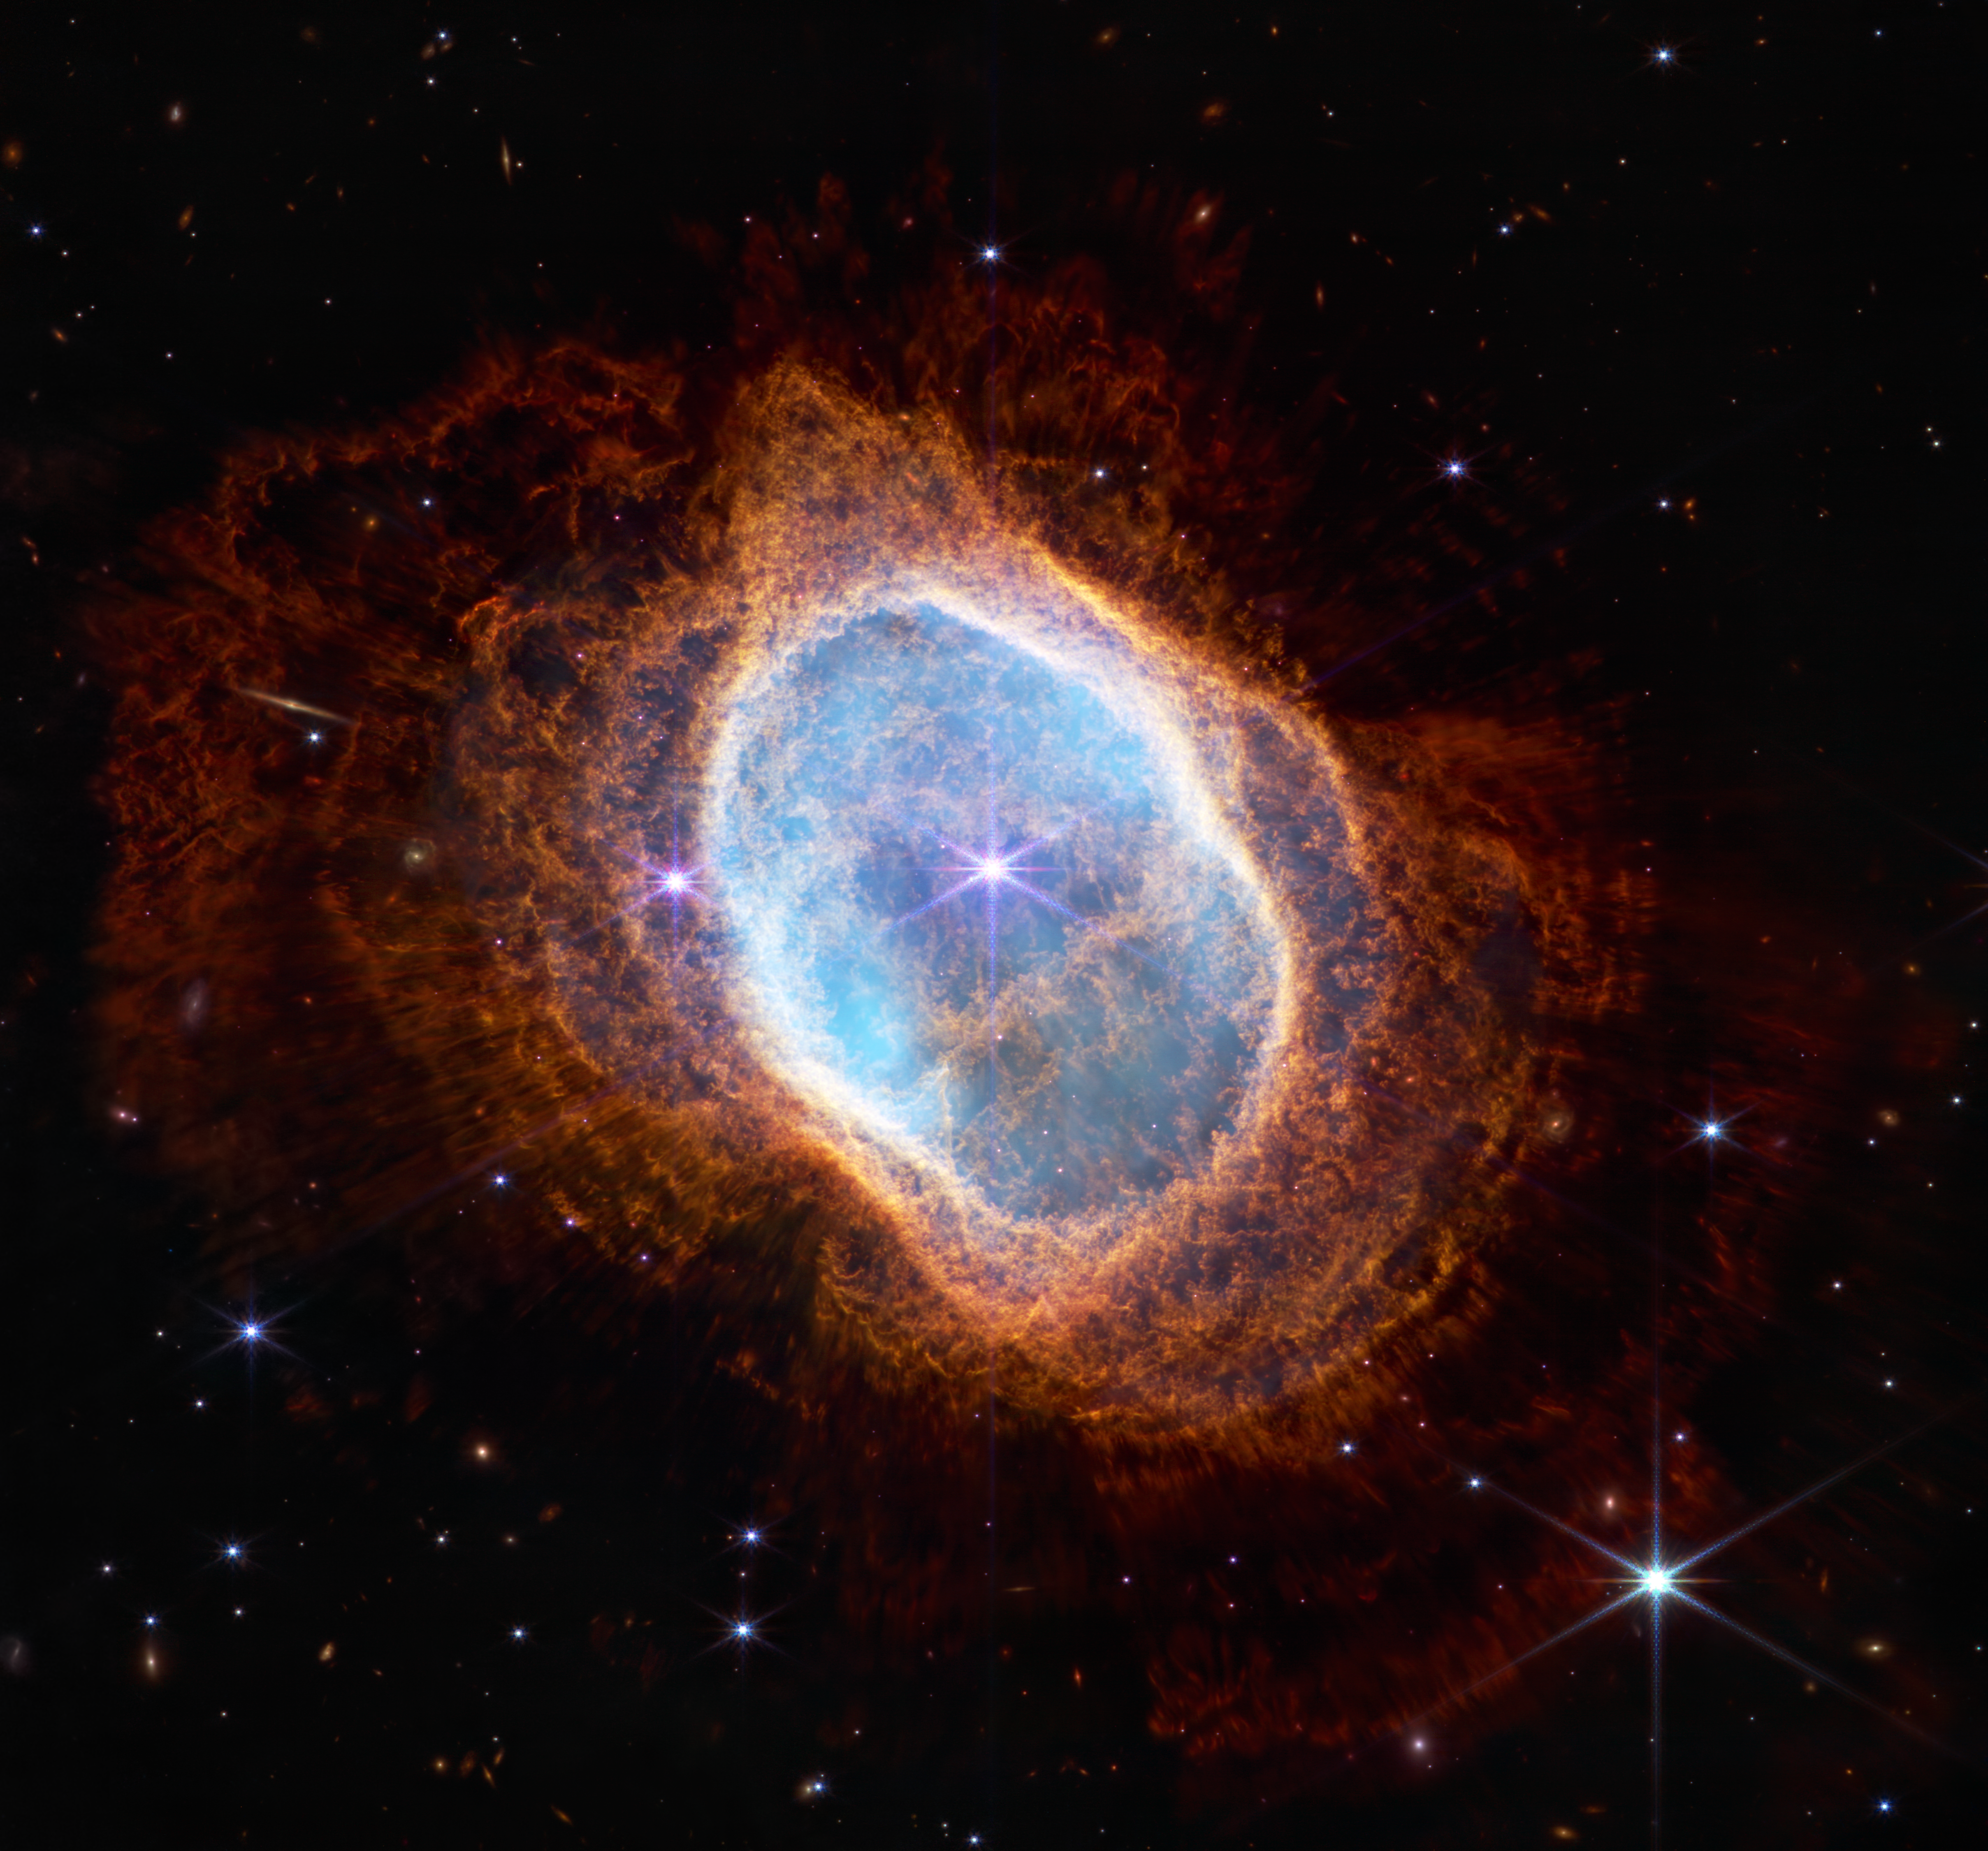

Southern Ring Nebula (NIRCam Image)

The bright star at the centre of NGC 3132, while prominent when viewed by the NASA/ESA/CSA James Webb Telescope in near-infrared light, plays a supporting role in sculpting the surrounding nebula. A second star, barely visible at lower left along one of the bright star’s diffraction spikes, is the nebula’s source. It has ejected at least eight layers of gas and dust over thousands of years.

But the bright central star visible here has helped ‘stir the pot’, changing the shape of this planetary nebula’s highly intricate rings by creating turbulence. The pair of stars are locked in a tight orbit, which leads the dimmer star to spray ejected material in a range of directions as they orbit one another, resulting in these jagged rings.

Hundreds of straight, brightly-lit lines pierce through the rings of gas and dust. These ‘spotlights’ emanate from the bright star and stream through holes in the nebula like sunlight through gaps in a cloud.

But not all of the starlight can escape. The density of the central region, set off in teal, is reflected by how transparent or opaque it is. Areas that are a deeper teal indicate that the gas and dust are denser — and light is unable to break free.

Data from Webb’s Near-Infrared Camera (NIRCam) were used to make this extremely detailed image. It is teeming with scientific information — and research will begin following its release.

This is not only a crisp image of a planetary nebula — it also shows us objects in the vast expanse of space behind it. The transparent red sections of the planetary nebula — and all the areas outside it — are filled with distant galaxies.

Look for the bright angled line at the upper left. It is not starlight — it is a faraway galaxy seen edge-on. Distant spirals, of many shapes and colours, also dot the scene. Those that are farthest away — or are very dusty — are small and red.

NIRCam was built by a team at the University of Arizona and Lockheed Martin’s Advanced Technology Center.

For a full array of Webb’s first images and spectra, including downloadable files, please visit: https://esawebb.org/initiatives/webbs-first-images/

Credit: NASA, ESA, CSA, STScI, and the Webb ERO Production Team